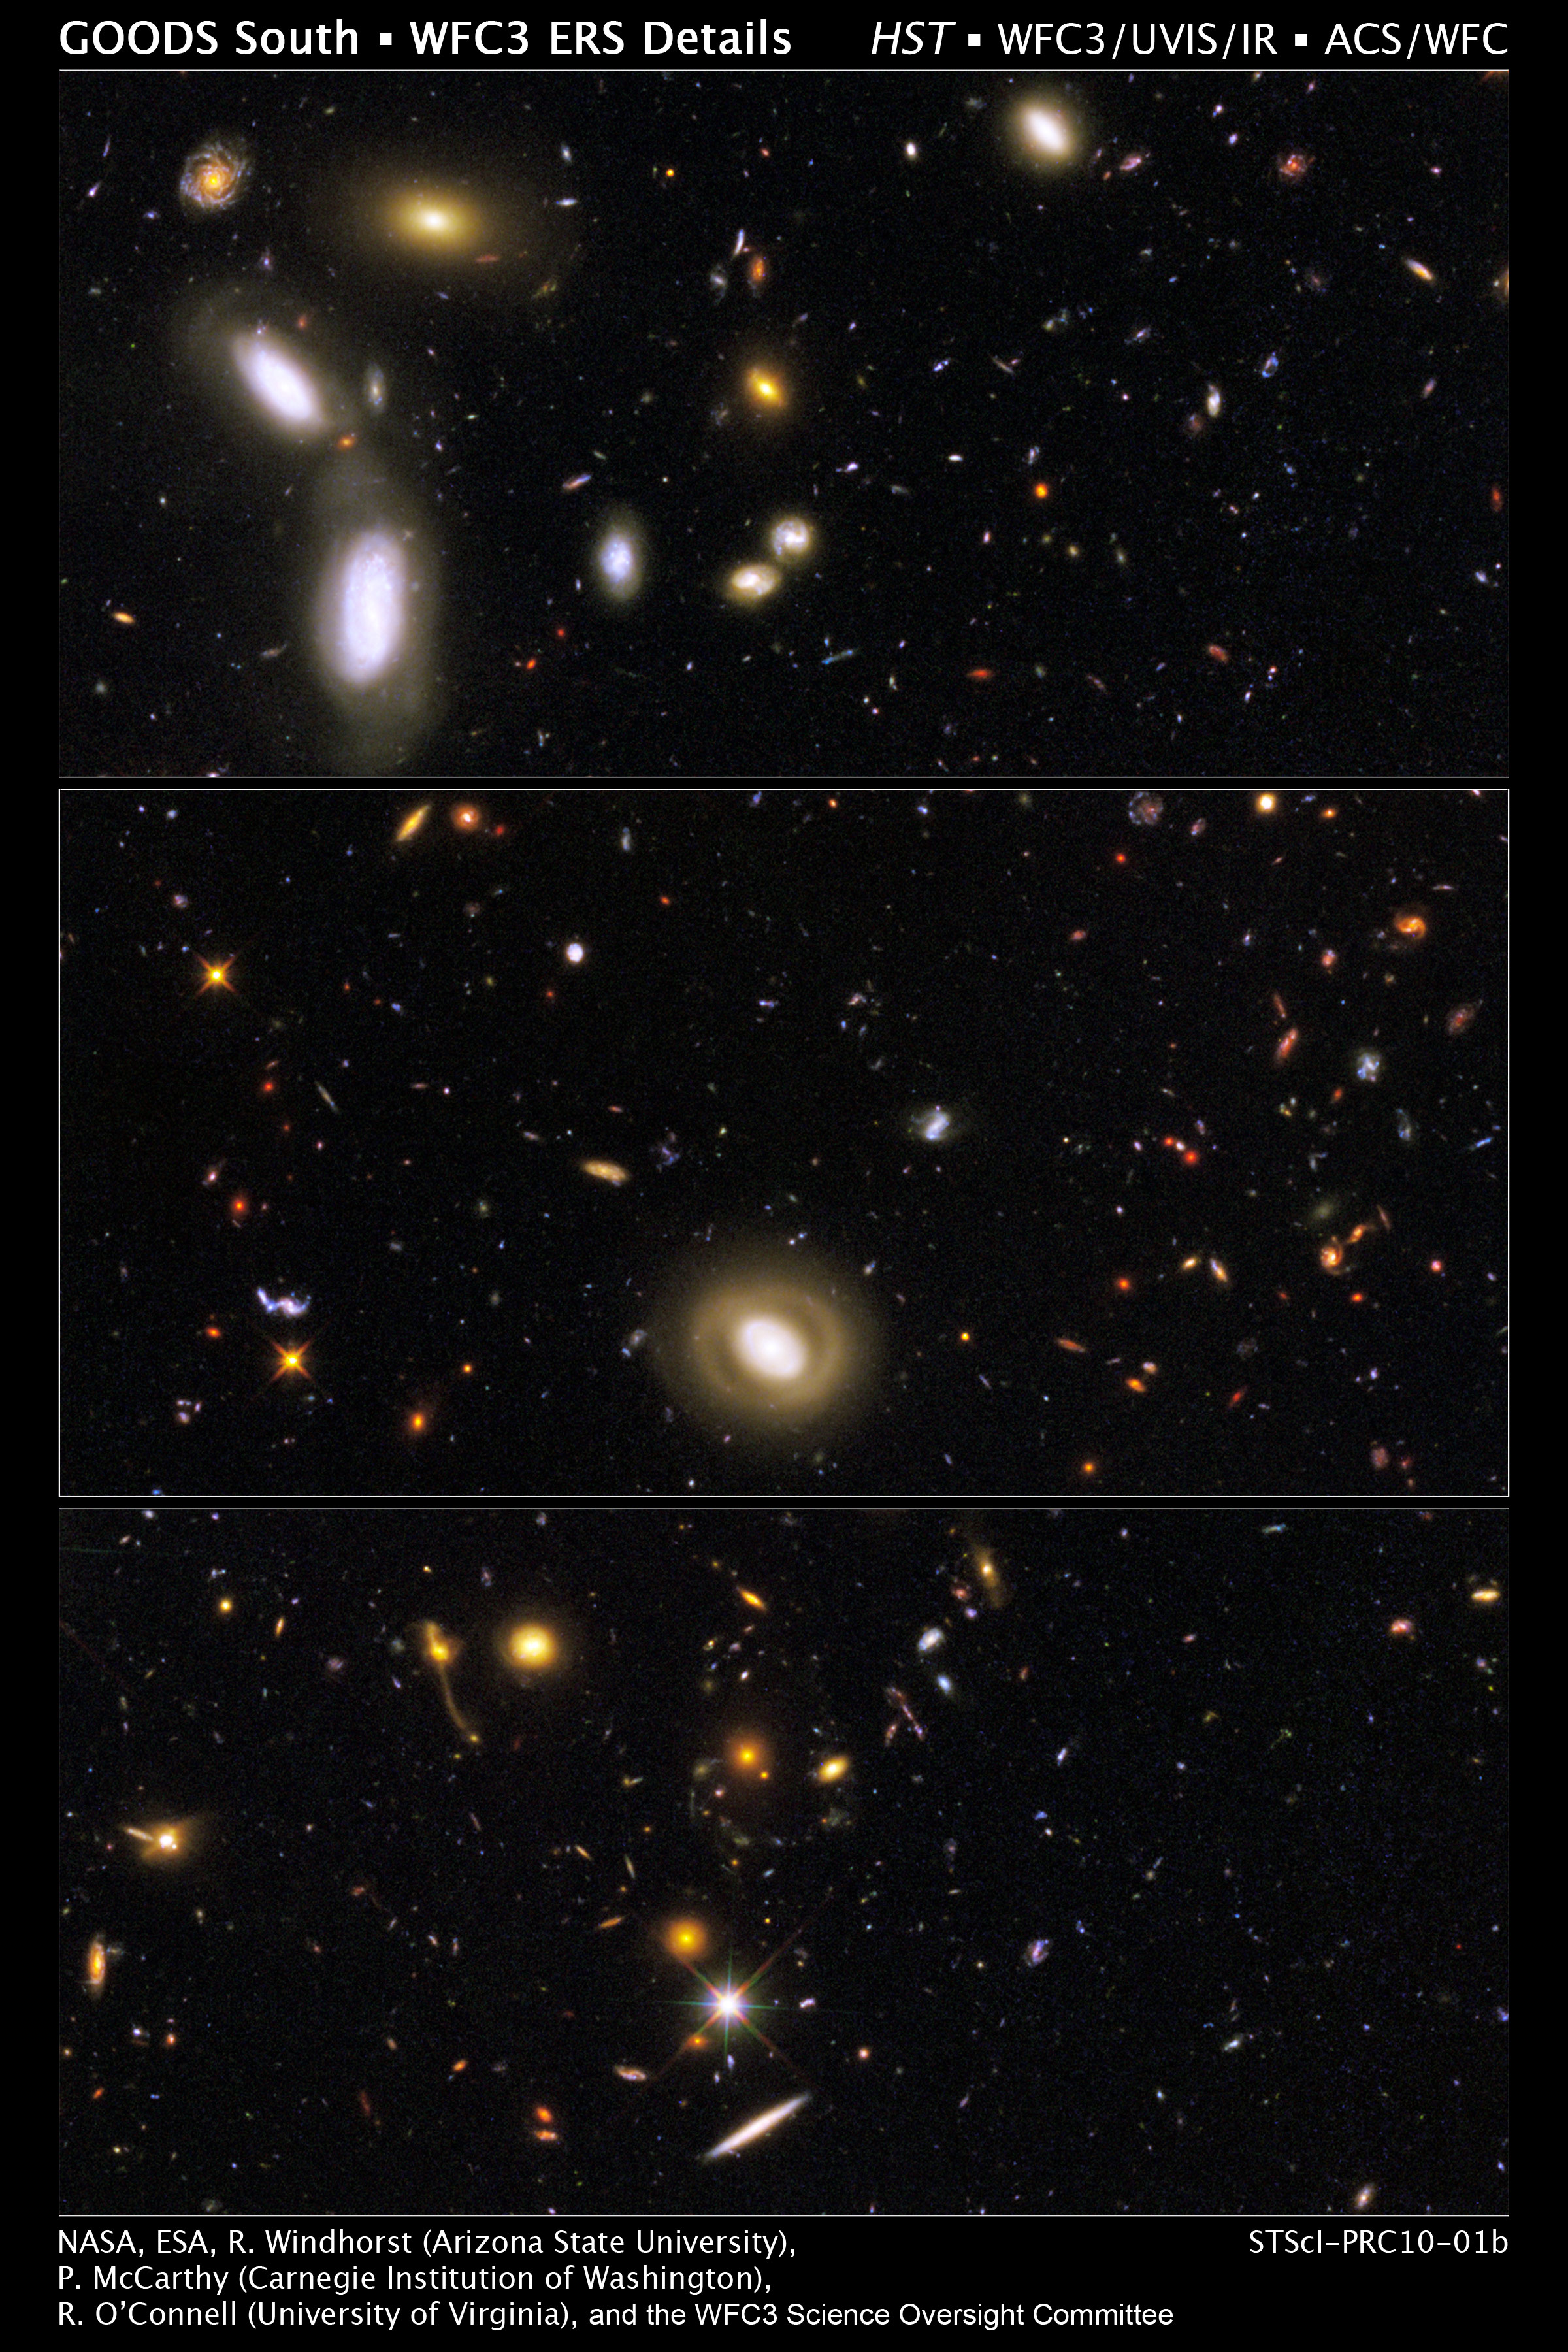

Close-Up Views of the GOODS Field

These three close-up views show the rich variety of galaxies that appear in the new panoramic, full-colour image of the Great Observatories Origins Deep Survey (GOODS) field, taken by the NASA/ESA Hubble Space Telescope. The full field reveals 7,500 galaxies in various stages of assembly and stretching back through most of the universe's history.

Astronomers combined new observations taken by the Wide Field Camera 3 (WFC3) and data taken by the Advanced Camera for Surveys (ACS) to make this mosaic.

The image combines a broad range of colours, from the ultraviolet, through visible light, and into the near-infrared. Such a detailed multi-colour view of the universe has never before been assembled in such a combination of colour, clarity, accuracy, and depth.

Hubble's sharp resolution and new colour versatility, produced by combining data from the two cameras, are allowing astronomers to sort out the various stages of galaxy formation. These three views reveal galaxy shapes that appear increasingly chaotic at each earlier epoch, as galaxies grew through accretion, collisions, and mergers. The galaxies range from the mature spirals and ellipticals in the foreground, to smaller, fainter, irregularly shaped galaxies, most of which are farther away, and therefore existed farther back in time. These smaller galaxies are considered the building blocks of the larger galaxies we see today.

Ultraviolet light taken by WFC3 shows the blue glow of hot, young stars in galaxies teeming with star birth. The orange light reveals the final buildup of massive galaxies about 8 billion to 10 billion years ago. The near-infrared light displays the red glow of very distant galaxies — in a few cases as far as 12 billion to 13 billion light-years away — whose light has been stretched, like a toy Slinky, from ultraviolet light to longer- wavelength infrared light due to the expansion of the universe.

The WFC3 observations were taken in September and October 2009; the ACS observations in 2004. The view covers a portion of the southern field of a large galaxy census called the Great Observatories Origins Deep Survey (GOODS), a deep-sky study by several observatories to trace the evolution of galaxies.

Credit: NASA, ESA, R. Windhorst, S. Cohen, M. Mechtley, and M. Rutkowski (Arizona State University, Tempe), R. O'Connell (University of Virginia), P. McCarthy (Carnegie Observatories), N. Hathi (University of California, Riverside), R. Ryan (University of California, Davis), H. Yan (Ohio State University) and A. Koekemoer (Space Telescope Science Institute)